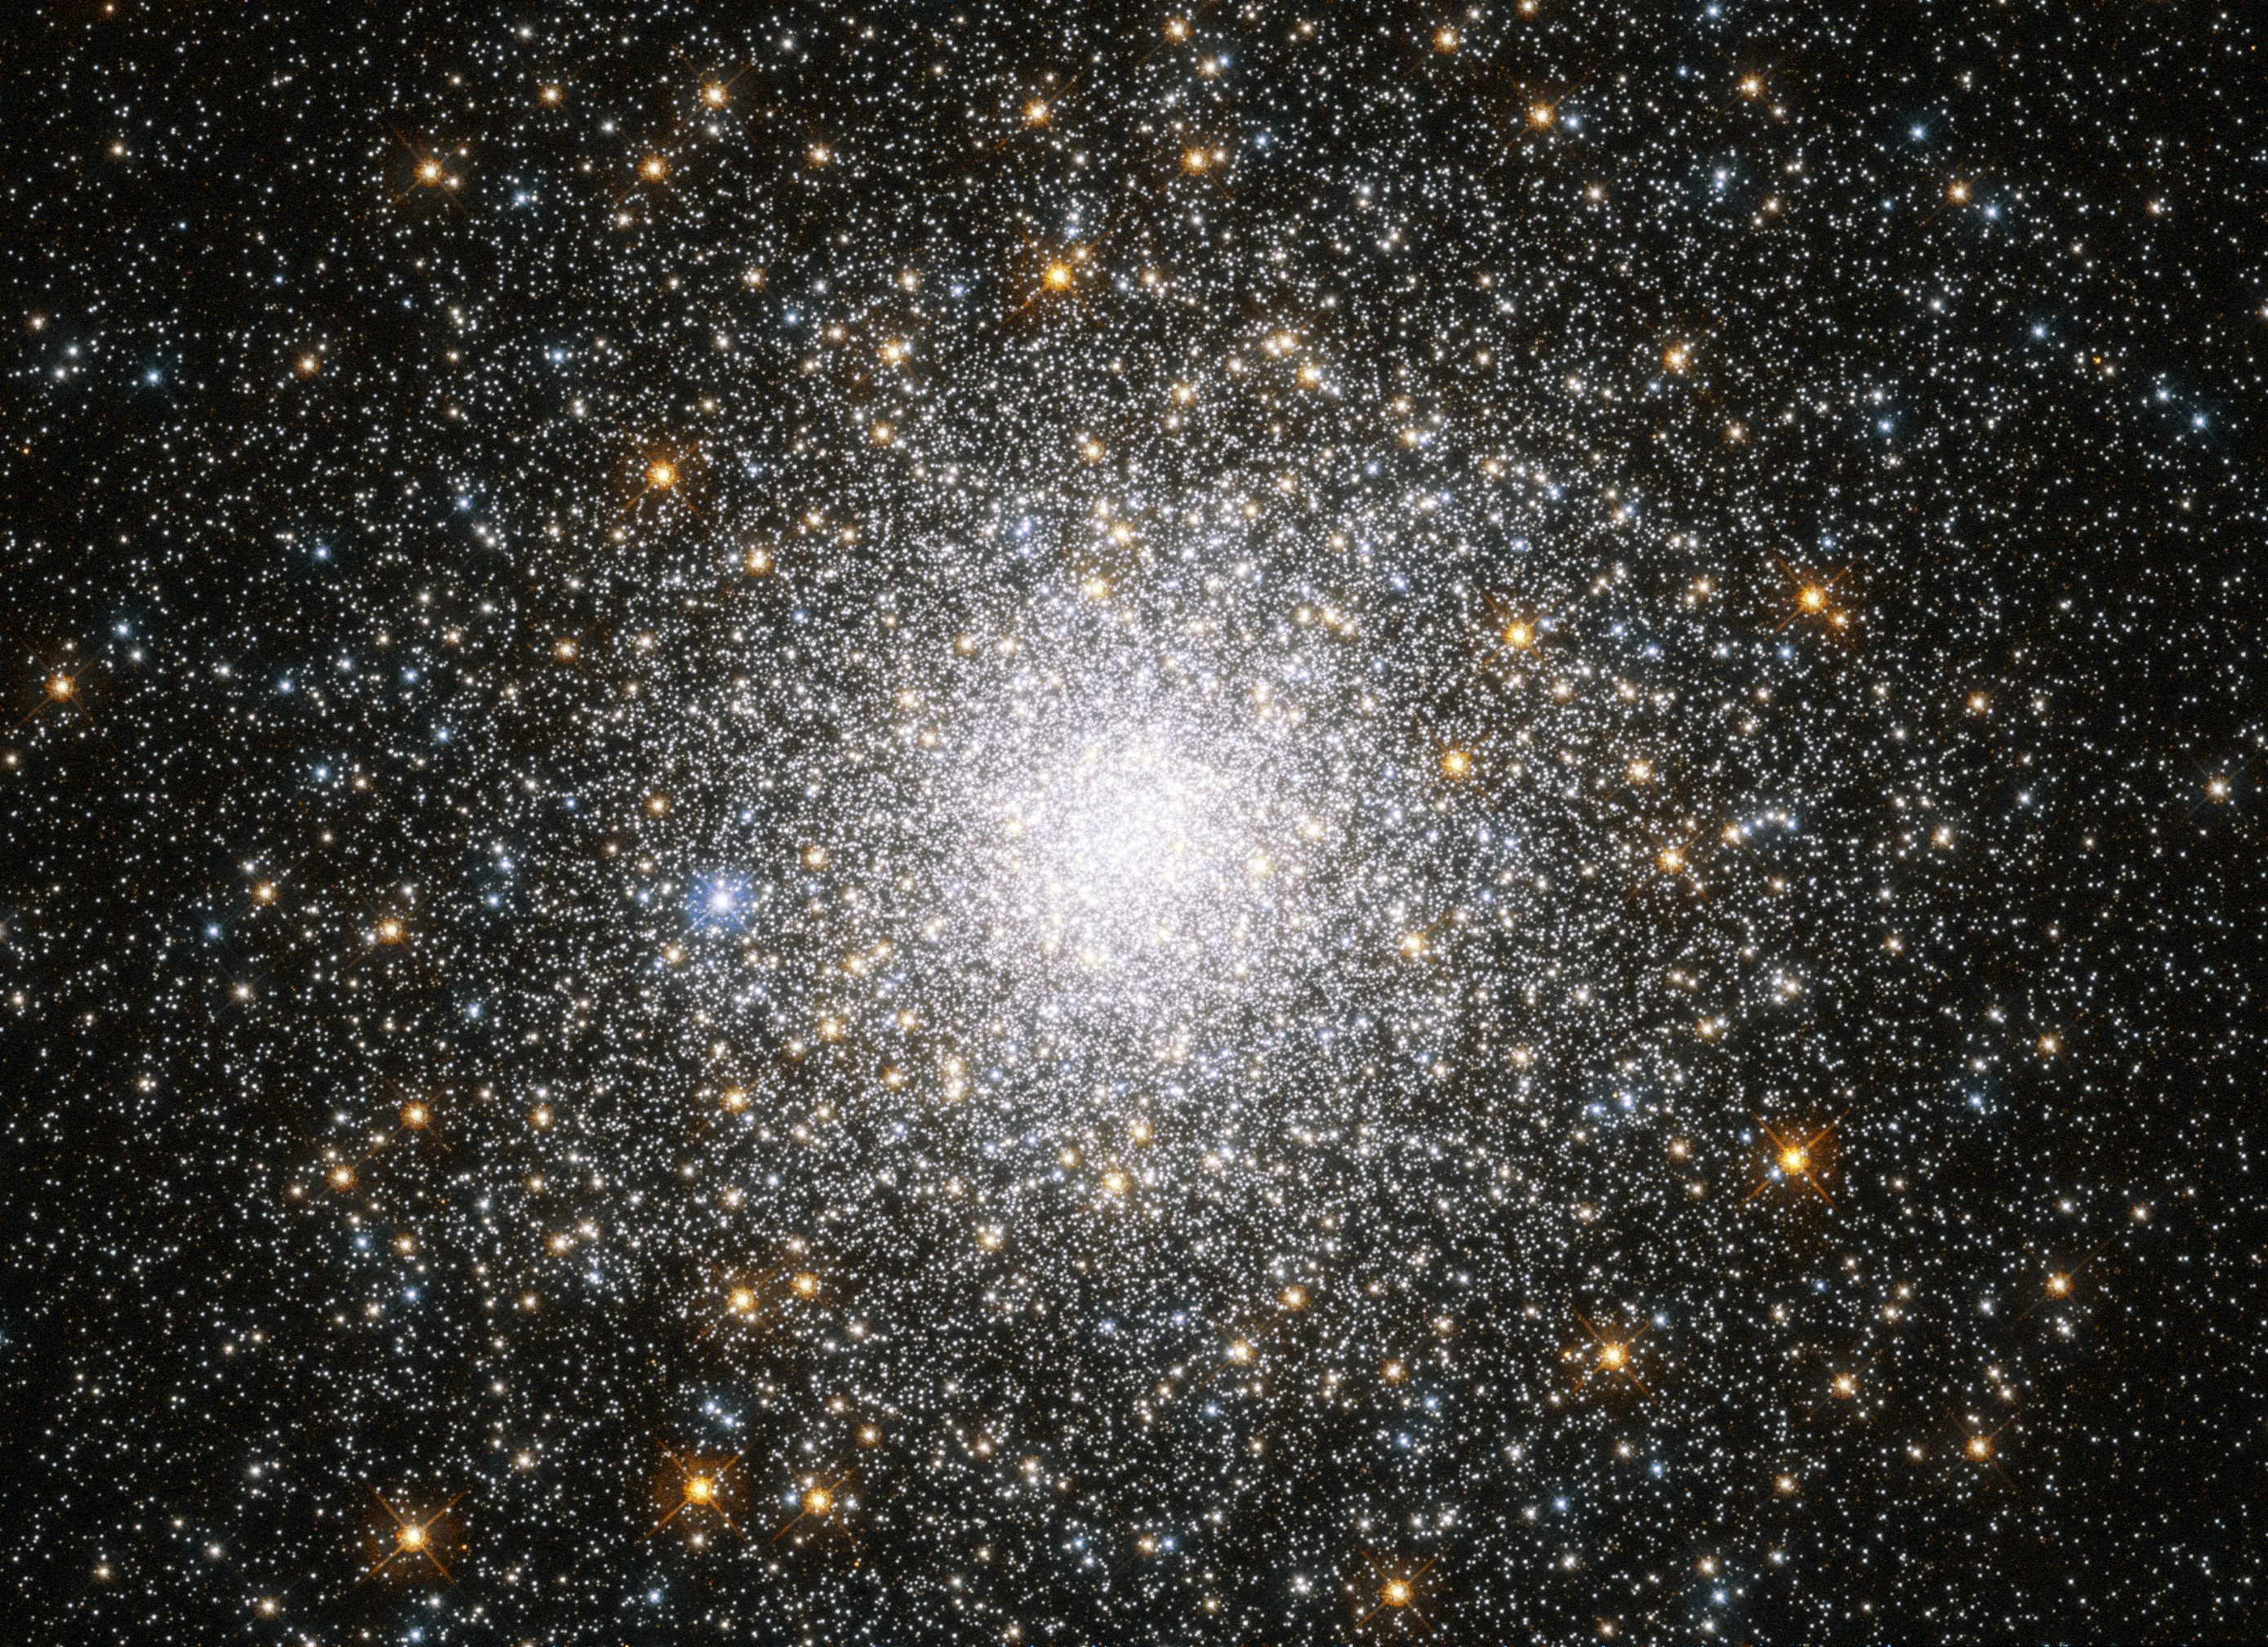

Crowded cluster

This sparkling burst of stars is Messier 75. It is a globular cluster: a spherical collection of stars bound together by gravity. Clusters like this orbit around galaxies and typically reside in their outer and less-crowded areas, gathering to form dense communities in the galactic suburbs.

Messier 75 lies in the constellation of Sagittarius (The Archer), around 67 000 light-years away from Earth. The majority of the cluster’s stars, about 400 000 intotal, are found in its core; it is one of the most densely populated clusters ever found, with a phenomenal luminosity of some 180 000 times that of the Sun. No wonder it photographs so well!

Discovered in 1780 by Pierre Méchain, Messier 75 was also observed by Charles Messier and added to his catalogue later that year. This image of Messier 75 was captured by the NASA/ESA Hubble Space Telescope’s Advanced Camera for Surveys.

Credit: ESA/Hubble & NASA, F. Ferraro et al.